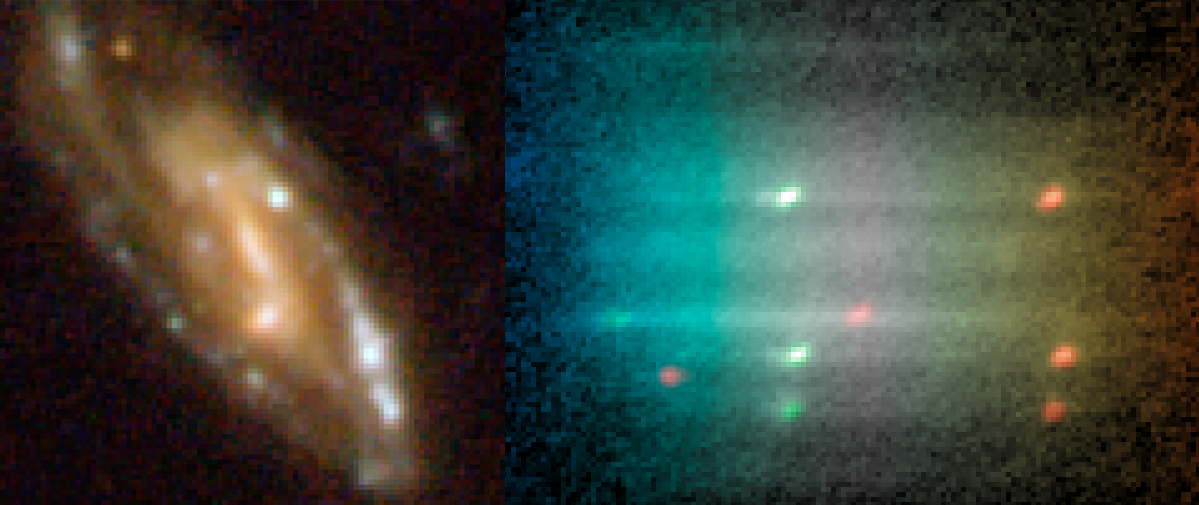

Composite of the galaxy image (left) and the spectrum (right)

A colour image (left) of a spiral galaxy in the Hubble Ultra Deep Field, one of the targets included in the Hubble Legacy Archive (HLA) release of slitless spectra from the Advanced Camera for Surveys (ACS). The colour picture was created from ACS images taken through the broadband filters F435W, F606W, F775W and F850LP. The galaxy is a typical spiral with a yellow stellar body and blue-white knots. While the image reveals the colour of the knots, it does not reveal their physical nature. The slitless spectrum (right) provides a one-shot spectrum of the whole galaxy and its constituent parts by spreading all the light in the image into its component colours. The spectrum, formed by combining many exposures with a total exposure time of 22 500 s, shows that the knots shine with very strong emission lines of doubly ionised oxygen (highlighted in green) and hydrogen (highlighted in red), revealing that these are regions of star formation in which the gas is heated by massive stars, as is typical in our own Milky Way and similar spirals. A redshift of 0.42 can be measured from the emission lines in the spectrum, meaning that the galaxy’s light has taken about 4 billion years to reach us.

Credit: ESA/Hubble and NASA